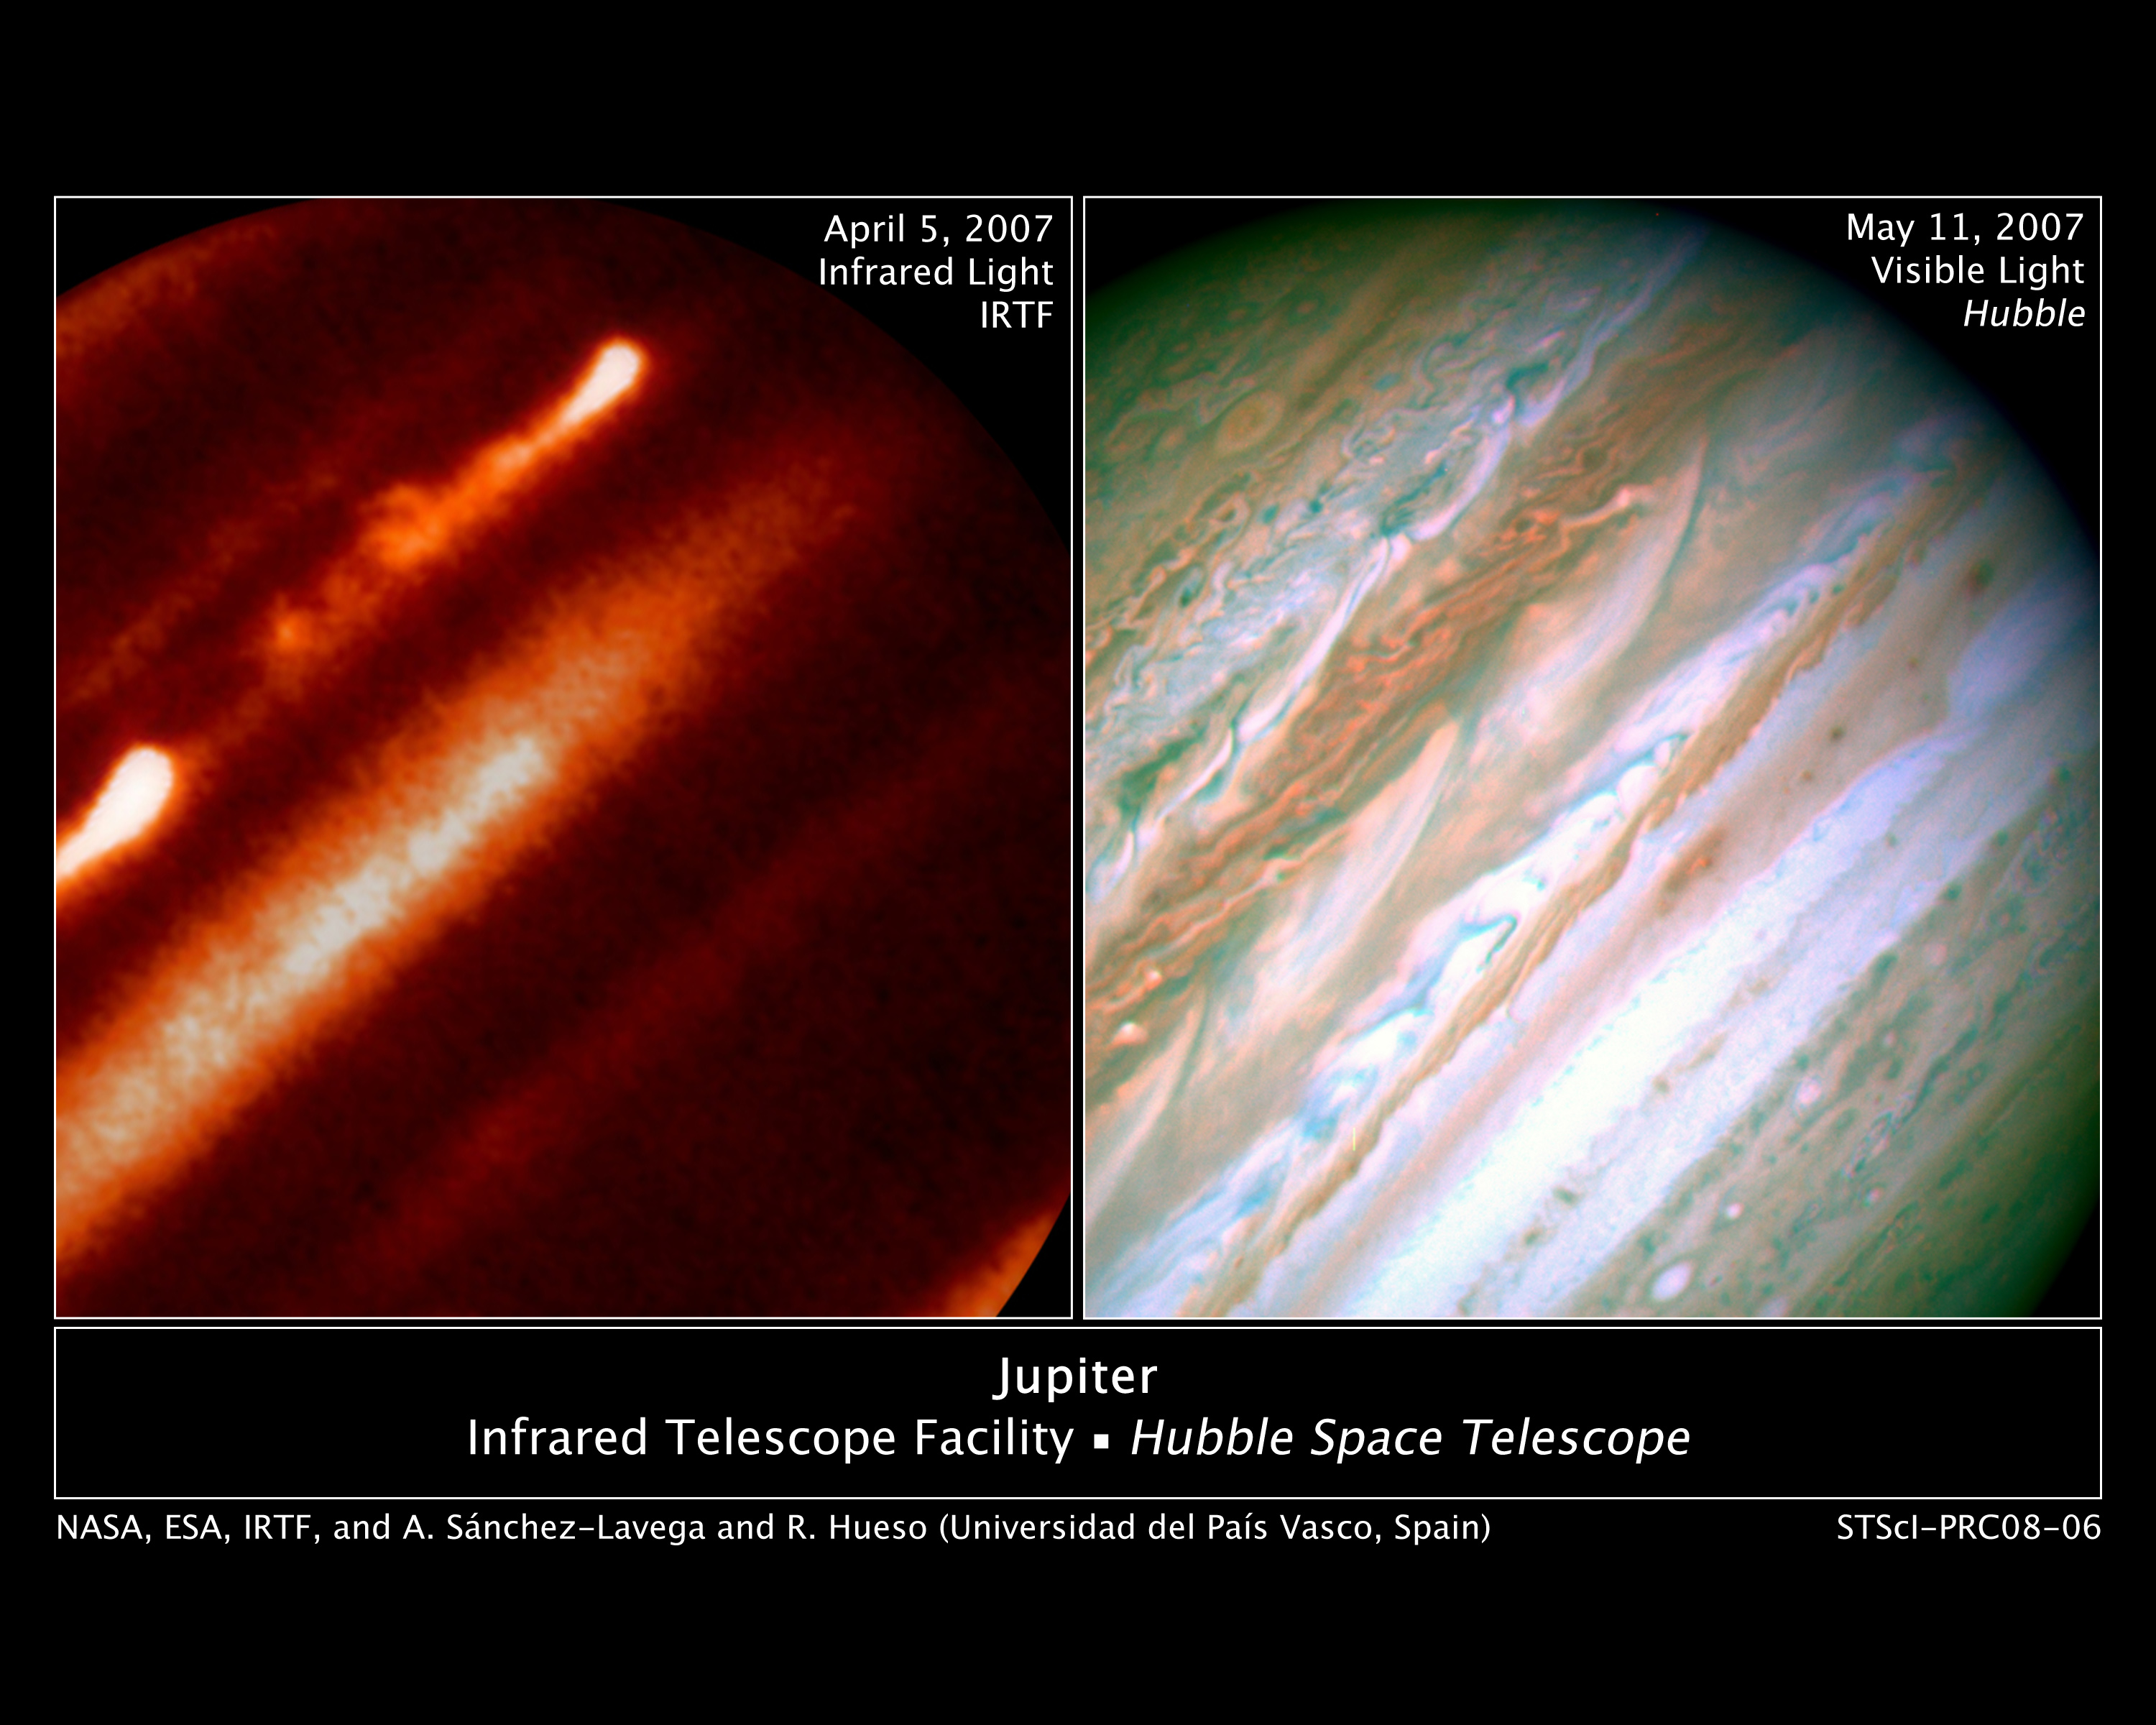

Internal Heat Drives Jupiter's Giant Storm Eruption

Detailed analysis of two continent-sized storms that erupted in Jupiter's atmosphere in March 2007 shows that Jupiter's internal heat plays a significant role in generating atmospheric disturbances. Understanding this outbreak could be the key to unlock the mysteries buried in the deep Jovian atmosphere, say astronomers.

Credit: NASA/ESA, IRTF, and A. Sÿnchez-Lavega and R. Hueso (Universidad del País Vasco, Spain)